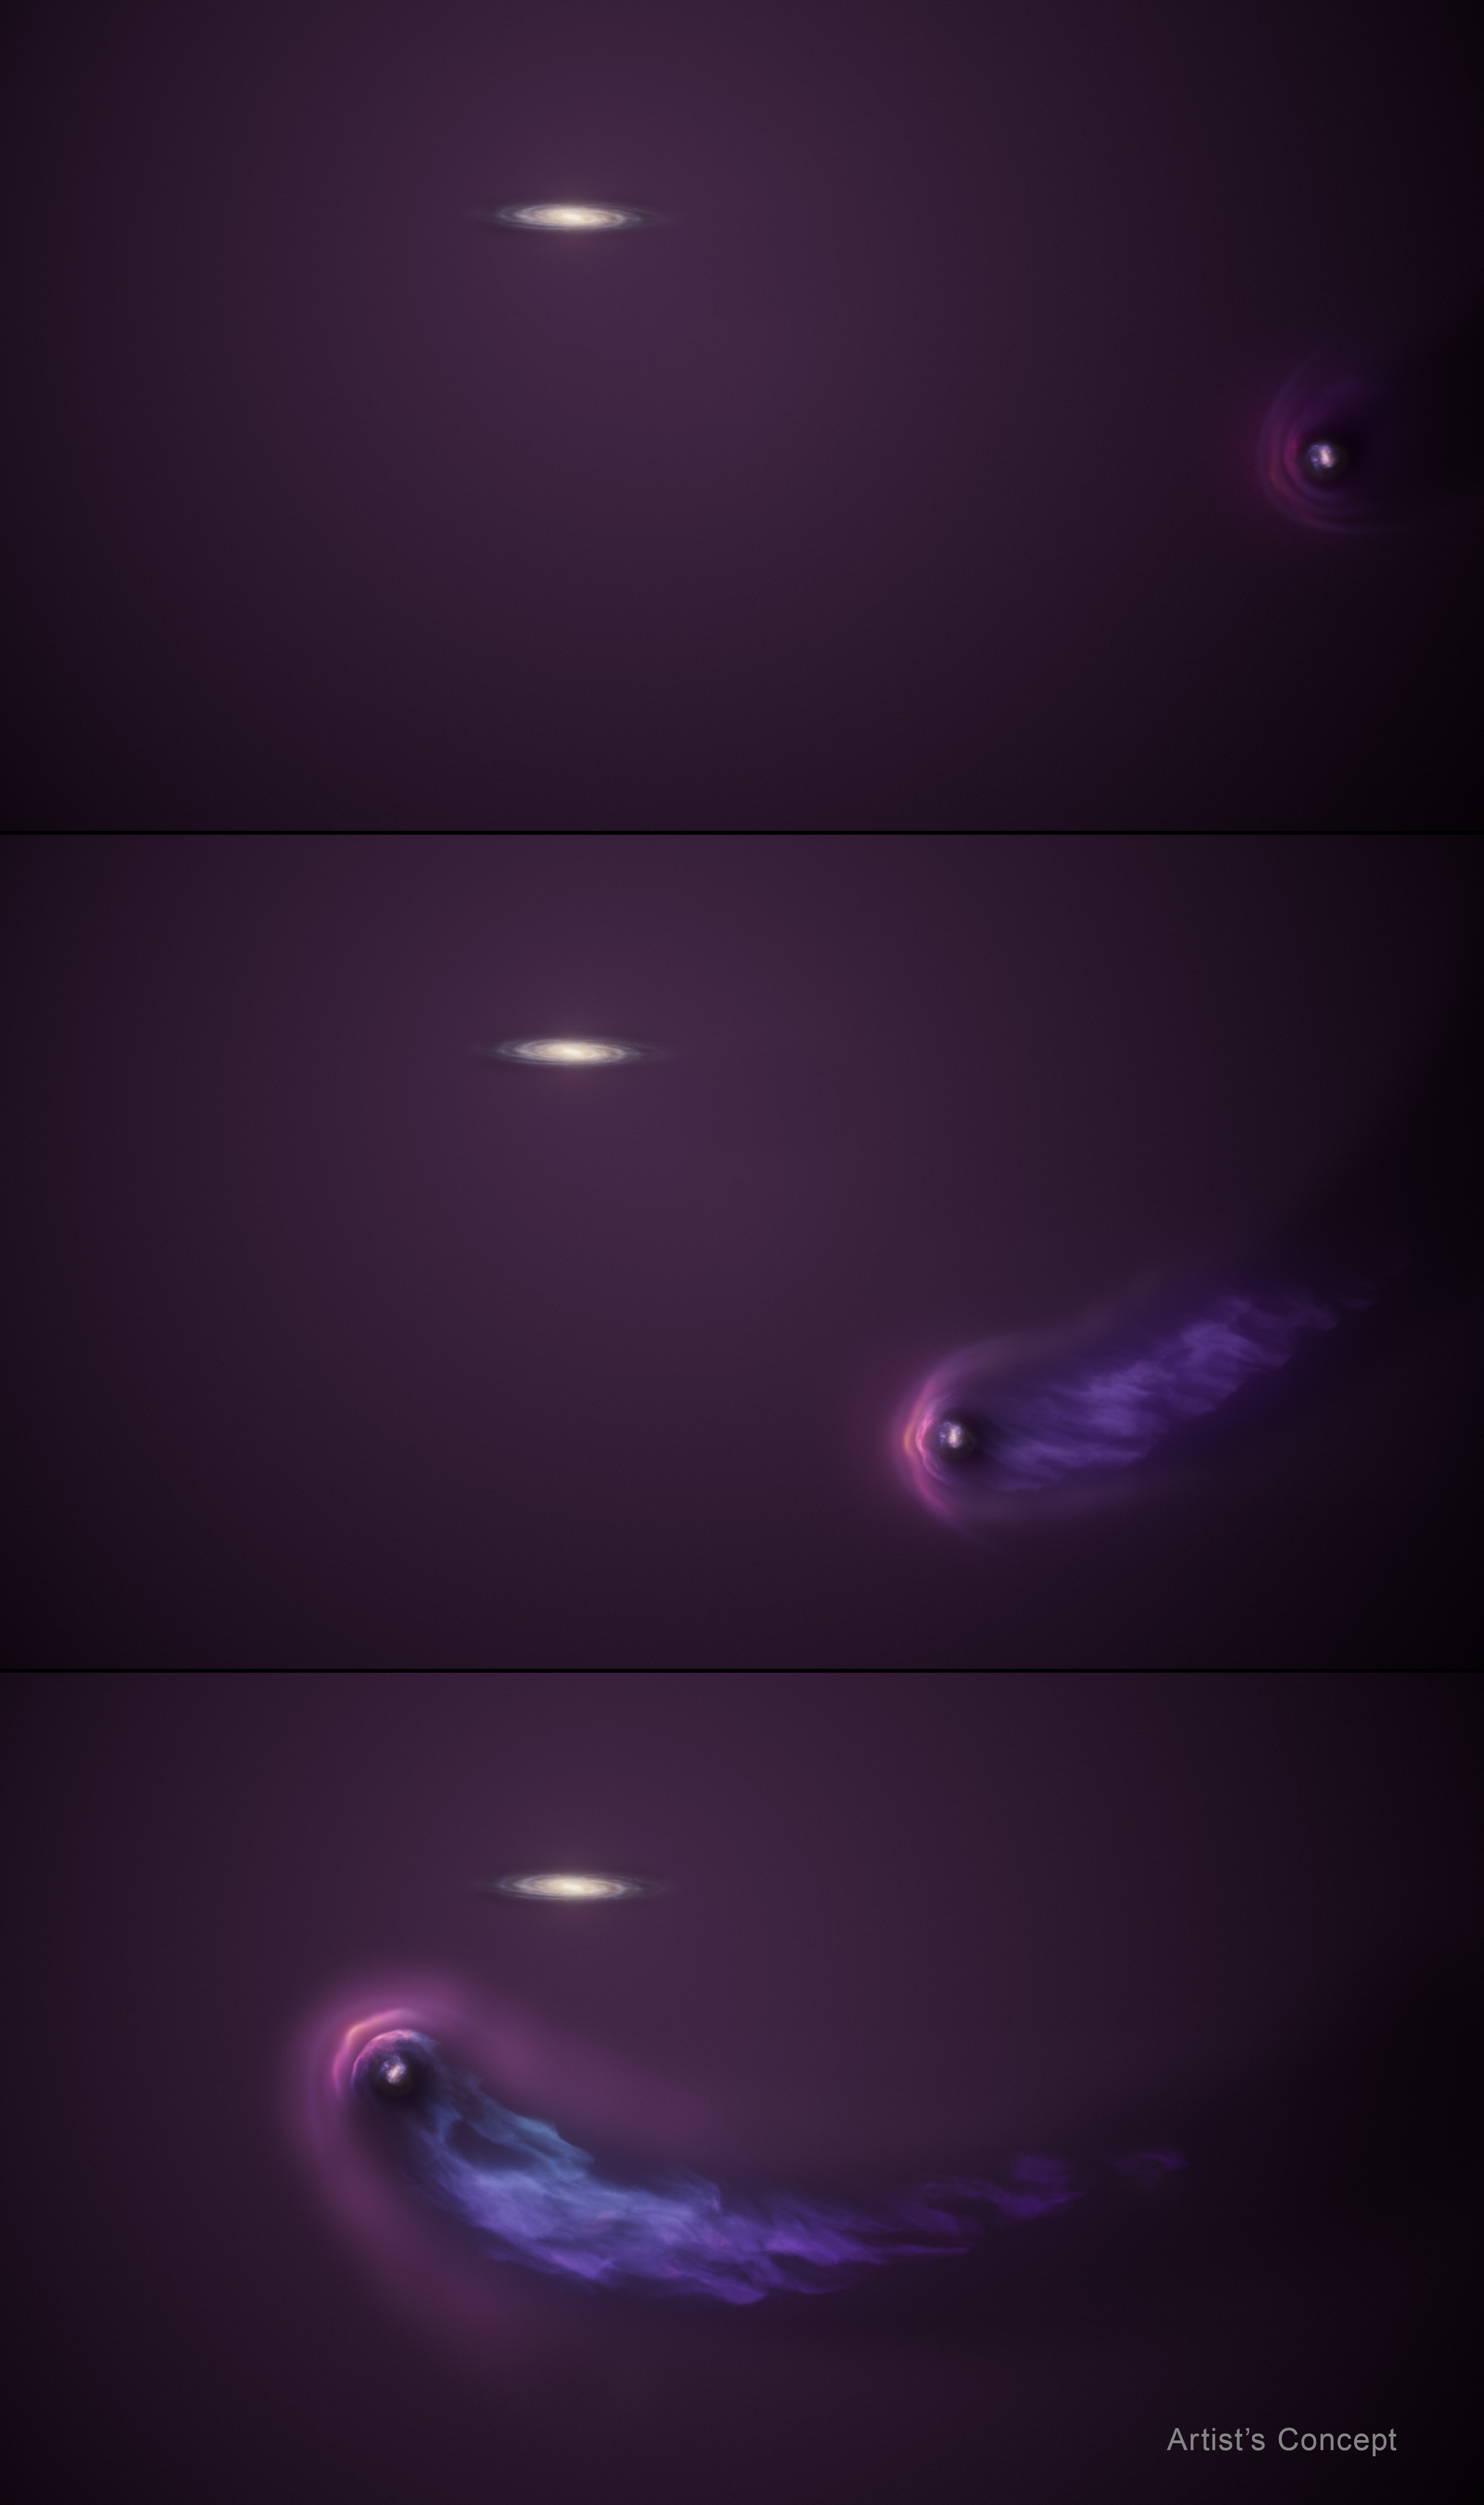

LMC passing through Milky Way halo (three-panel artist’s concept)

This artist’s concept illustrates the Large Magellanic Cloud’s (LMC’s) encounter with the Milky Way galaxy’s gaseous halo. In the top panel, at the middle of the right side, the LMC begins crashing through our galaxy’s much more massive halo. The bright purple bow shock represents the leading edge of the LMC’s halo, which is being compressed as the Milky Way’s halo pushes back against the incoming LMC. In the middle panel, part of the halo is being stripped and blown back into a streaming tail of gas that eventually will rain into the Milky Way. The bottom panel shows the progression of this interaction, as the LMC’s comet-like tail becomes more defined. A compact LMC halo remains. Because the LMC is just past its closest approach to the Milky Way and is moving outward into deep space again, scientists do not expect the residual halo will be lost.

Credit: NASA, ESA, R. Crawford (STScI)